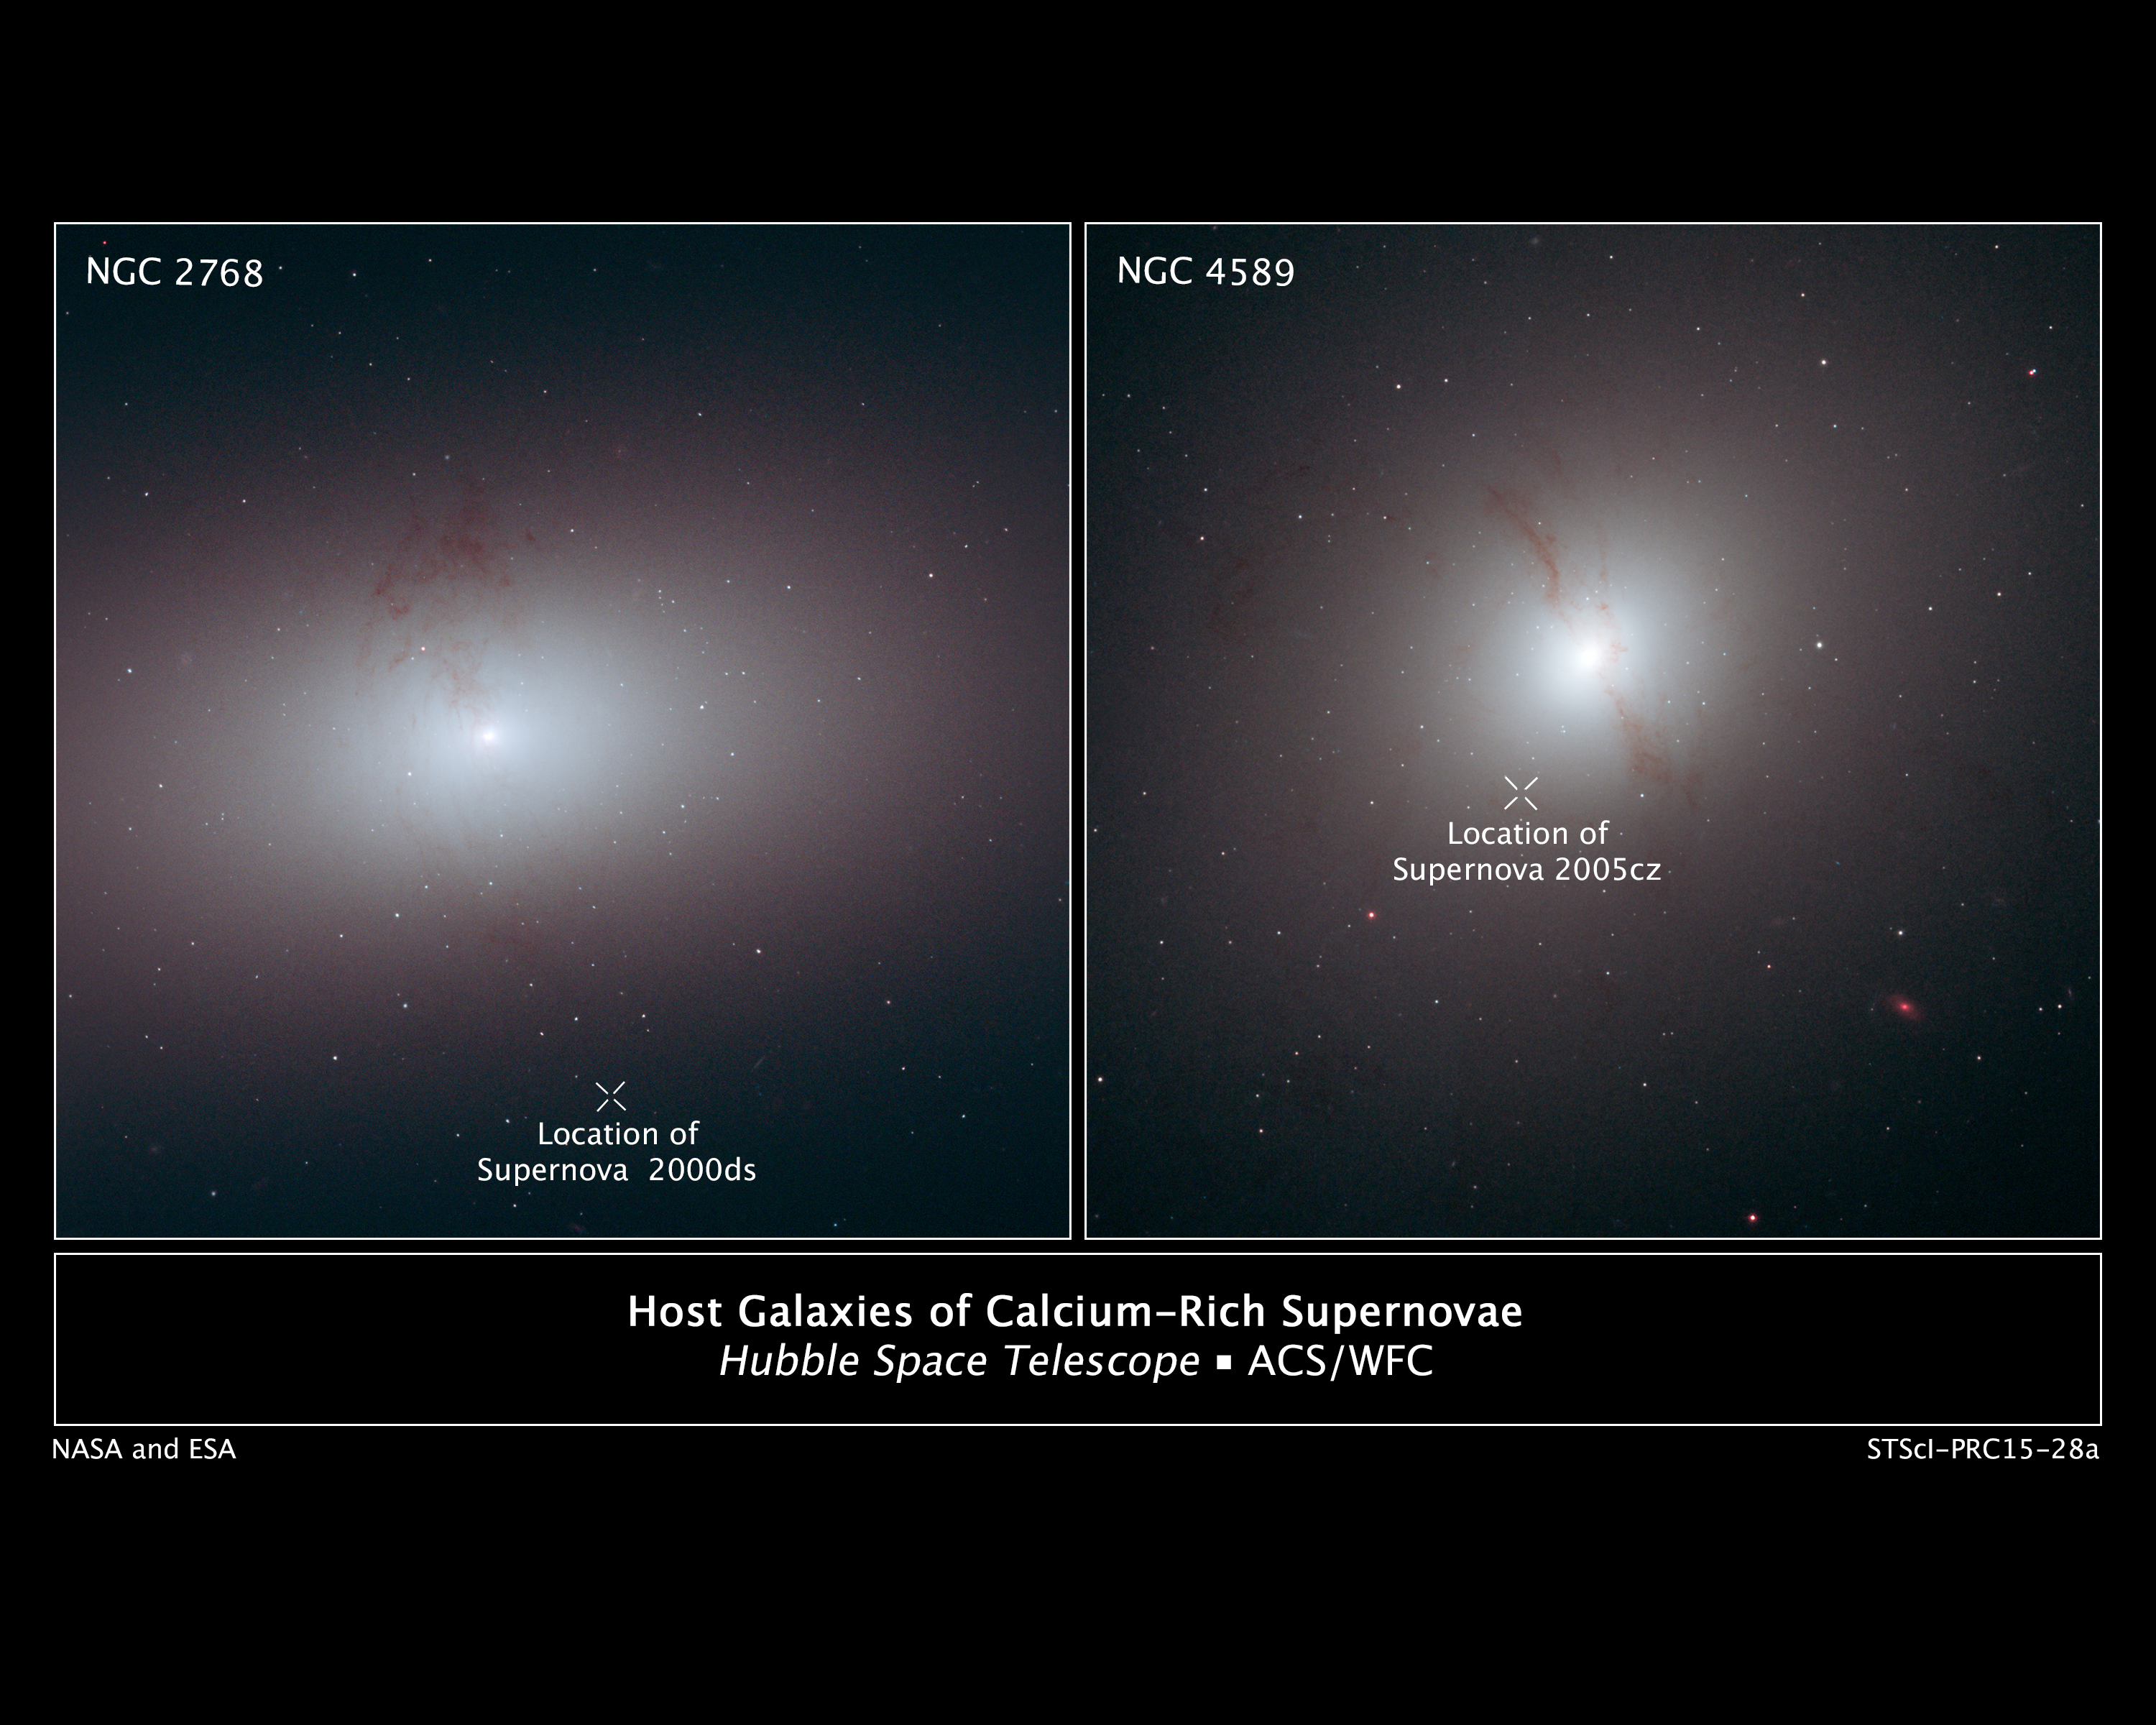

Host galaxies of calcium-rich supernovae

These Hubble Space Telescope images show elliptical galaxies with dark, wispy dust lanes, the signature of a recent galaxy merger. The dust is the only relic of a smaller galaxy that was consumed by the larger elliptical galaxy.

The "X" in the images marks the location of supernova explosions that are associated with the galaxies. Each supernova may have been gravitationally kicked out of its host galaxy by a pair of central supermassive black holes. When two galaxies merge, so do their supermassive black holes. Astronomers suggest the supernovae were stars that were once part of double-star systems. These systems wandered too close to the binary black holes, which ejected them from their galaxies. Eventually, the stars in each system moved close enough together to trigger a supernova blast.

These outcast supernovae are located at various distances from their home galaxies. SN 2000ds (left) is at least 12,000 light-years from its galaxy, NGC 2768; SN 2005cz (right) is at least 7,000 light-years from its galaxy, NGC 4589. NGC 2768 resides 75 million light-years from Earth, and NGC 4589 is 108 million light-years away.

The supernovae are part of a census of 13 supernovae to determine why they detonated outside the cozy confines of galaxies. The study is based on archived images made by several telescopes, including Hubble.

Both galaxies were observed by Hubble's Advanced Camera for Surveys. The image of NGC 4589 was taken on Nov. 11, 2006, and the image of NGC 2768 on May 31, 2002.

Credit: NASA, ESA, and R. Foley (University of Illinois)